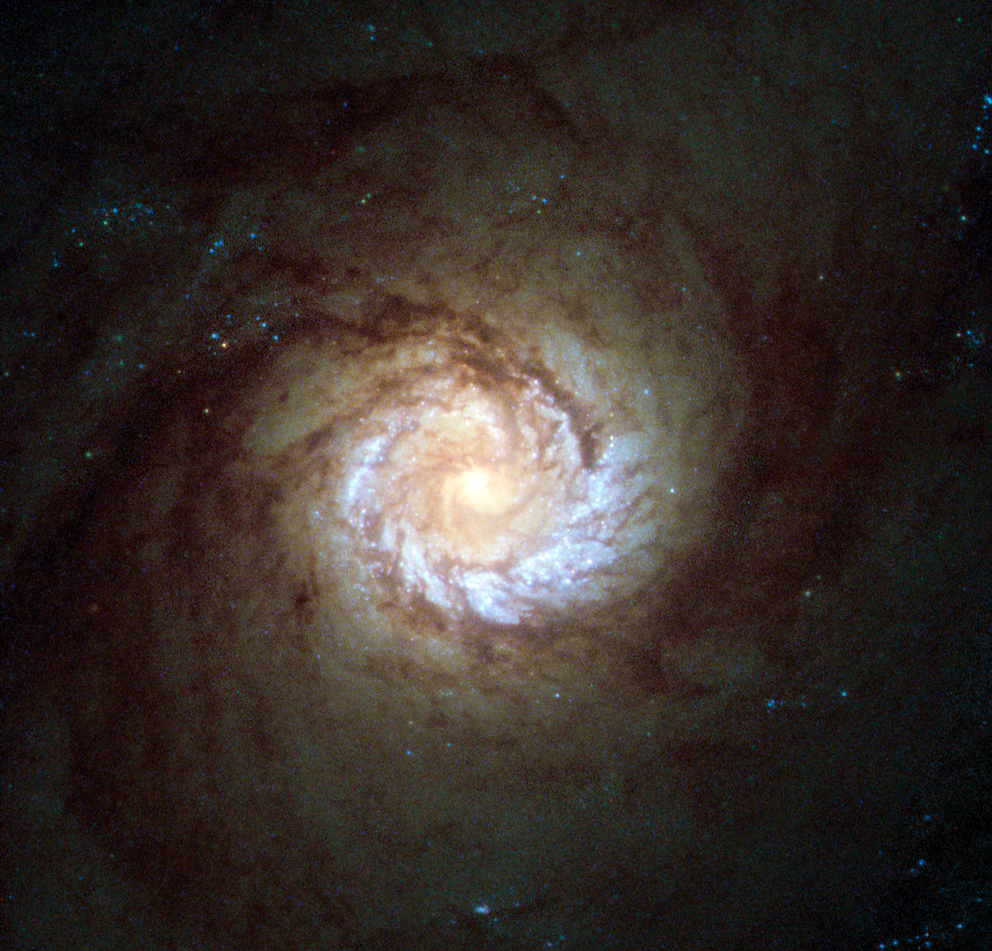

A hungry starburst galaxy

This new Hubble picture is the sharpest ever image of the core of spiral galaxy Messier 61 and the central part of the galaxy is shown in striking detail. The image is comprised of 2003 and 2004 data from the now decommissioned High Resolution Channel (HRC) of Hubble's Advanced Camera for Surveys.

Also known as NGC 4303, this galaxy is roughly 100 000 light-years across, comparable in size to our galaxy, the Milky Way. Both Messier 61 and our home galaxy belong to a group of galaxies known as the Virgo Supercluster in the constellation of Virgo (The Virgin) — a group of galaxy clusters containing up to 2000 spiral and elliptical galaxies in total.

Messier 61 is a type of galaxy known as a starburst galaxy. Starburst galaxies experience an incredibly high rate of star formation, hungrily using up their reservoir of gas in a very short period of time (in astronomical terms). But this is not the only activity going on within the galaxy; deep at its heart there is thought to be a supermassive black hole that is violently spewing out radiation.

Despite its inclusion in the Messier Catalogue, Messier 61 was actually discovered by Italian astronomer Barnabus Oriani in 1779. Charles Messier also noticed this galaxy on the very same day as Oriani, but mistook it for a passing comet — the comet of 1779.

A version of this image was submitted to the Hubble’s Hidden Treasures image processing competition by Flickr user Det58.

Credit: ESA/Hubble & NASA Acknowledgement: Det58